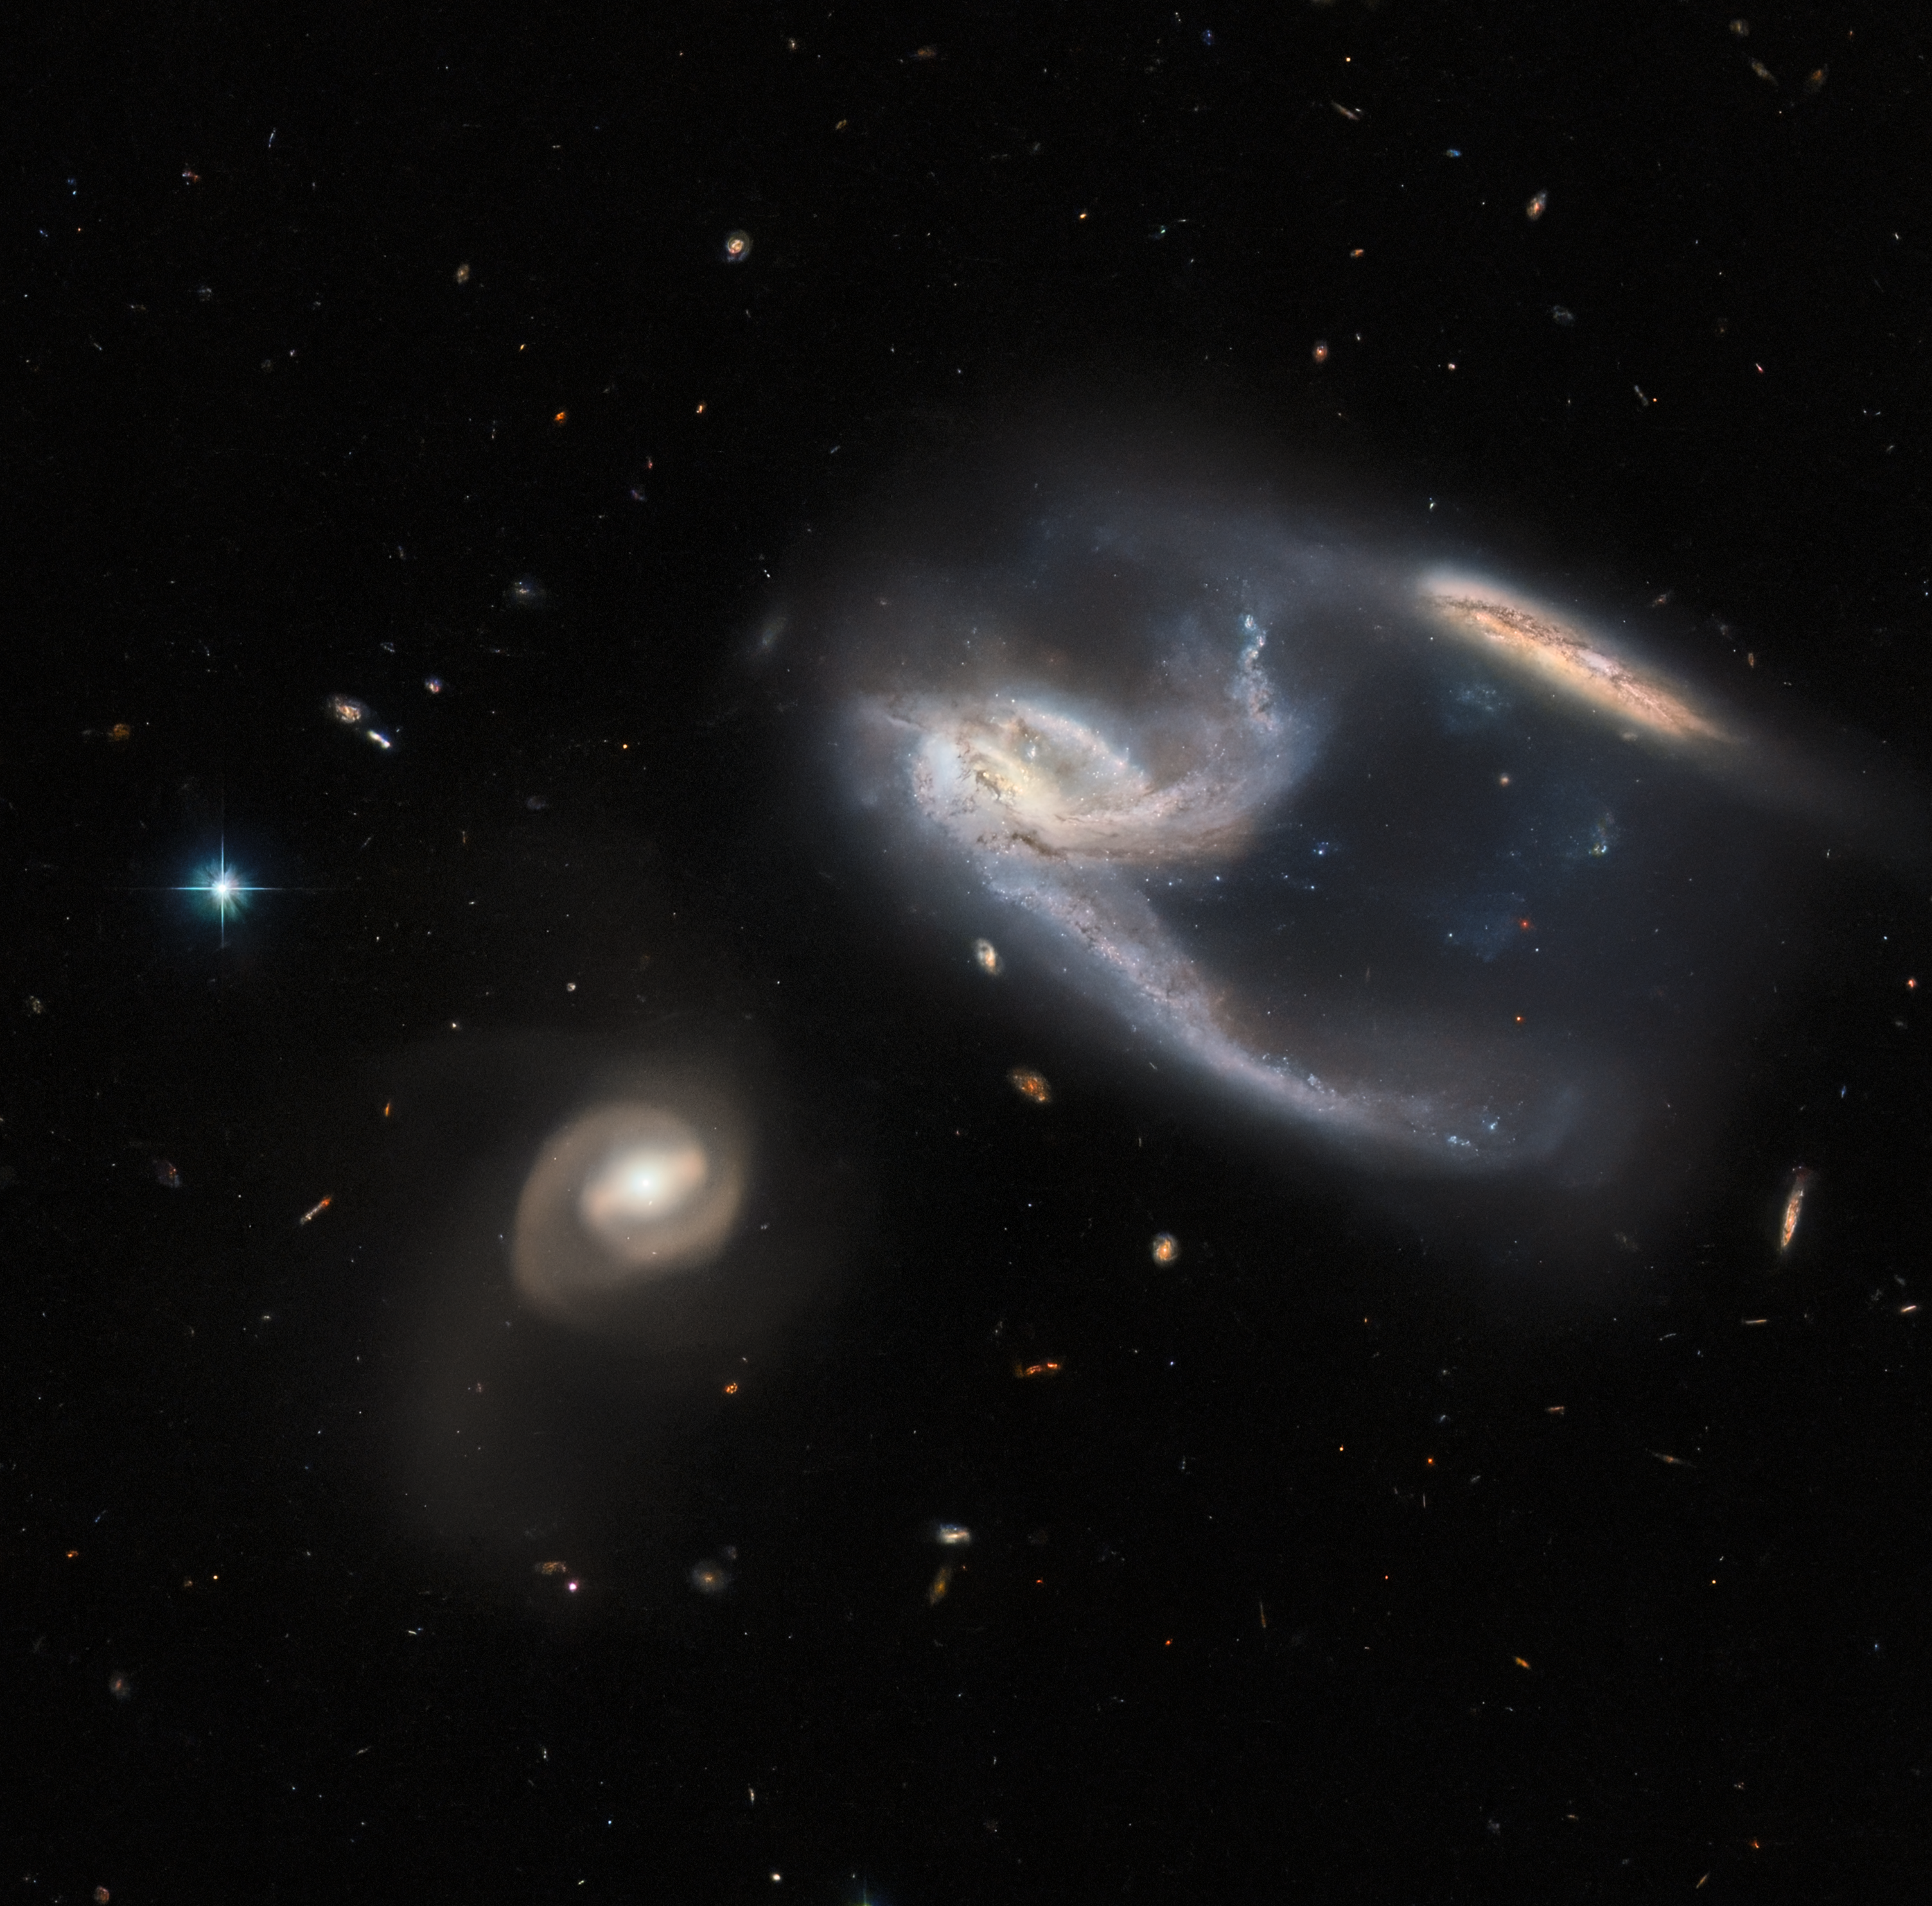

Strike!

The subject of this image is a group of three galaxies, collectively known as NGC 7764A. They were imaged by the NASA/ESA Hubble Space Telescope, using both its Advanced Camera for Surveys (ACS) and Wide Field Camera 3 (WFC3). The two galaxies in the upper right of the image appear to be interacting with one another — indeed, the long trails of stars and gas extending from them both give the impression that they have both just been struck at great speed, thrown into disarray by the bowling-ball-shaped galaxy to the lower left of the image. In reality, however, interactions between galaxies happen over very long time periods, and galaxies rarely collide head-on with one another. It is also unclear whether the galaxy to the lower left is actually interacting with the other two, although they are so relatively close in space that it seems possible that they are. By happy coincidence, the collective interaction between these galaxies have caused the two on the upper right to form a shape, which from our Solar System's perspective, ressembles the starship known as the USS Enterprise from Star Trek!

NGC 7764A, which lies about 425 million light years from Earth in the constellation Phoenix, is a fascinating example of just how awkward astronomical nomenclature can be. The three galaxies are individually referred to as NGC 7764A1, NGC 7764A2 and NGC 7764A3, and just to be really difficult, an entirely separate galaxy, named NGC 7764, sits in the skies about a Moon’s distance (as seen from Earth) away. This rather haphazard naming makes more sense when we consider that many of the catalogues for keeping track of celestial bodies were compiled well over 100 years ago, long before modern technology made standardising scientific terminology much easier. As it is, many astronomical objects have several different names, or might have names that are so similar to other objects’ names that they cause confusion.

Credit: ESA/Hubble & NASA, J. Dalcanton, Dark Energy Survey, DOE, FNAL, DECam, CTIO, NOIRLab/NSF/AURA, ESO Acknowledgement: J. Schmidt